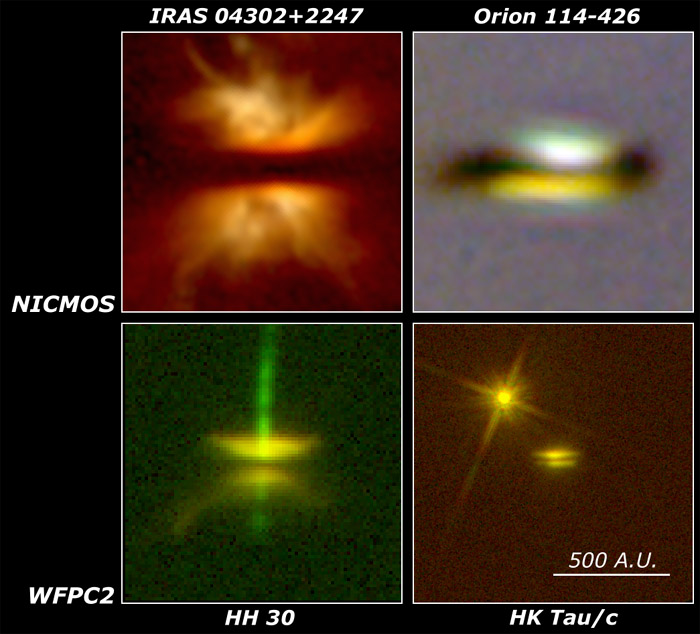

Four young stars with nearly edge-on disks

Four young stars with nearly edge-on disks observed by the Hubble Space Telescope. All are shown at the same linear scale, with each box being 1200 astronomical units square (111 billion miles, or about 20 times the diameter of Neptune's orbit). The different sizes and structures of the disks provide clues to their masses and evolutionary states.

Top row: NICMOS images of IRAS 04302+2247 and Orion 114-426.

Credit: Deborah Padgett, IPAC/Caltech